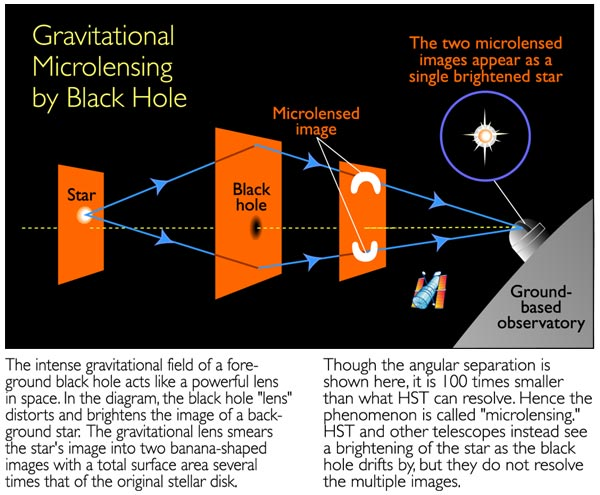

Gravitational microlensing by black hole (Illustration)

The intense gravitational field of a foreground black hole acts like a powerful lens in space. In the diagram, the black hole 'lens' distorts and brightens the image of a background star. The gravitation lens smears the star's image into two banana-shaped images with a total surface area several times that of the original stellar disk.

Though the angular separation is shown here, it is 100 times smaller than what HST can resolve. Hence the phenomenon is called 'microlensing'. HST and other telescopes instead see a brightening of the Star as the black hole drifts by, but they do not resolve the multiple images.

Credit: NASA/ESA